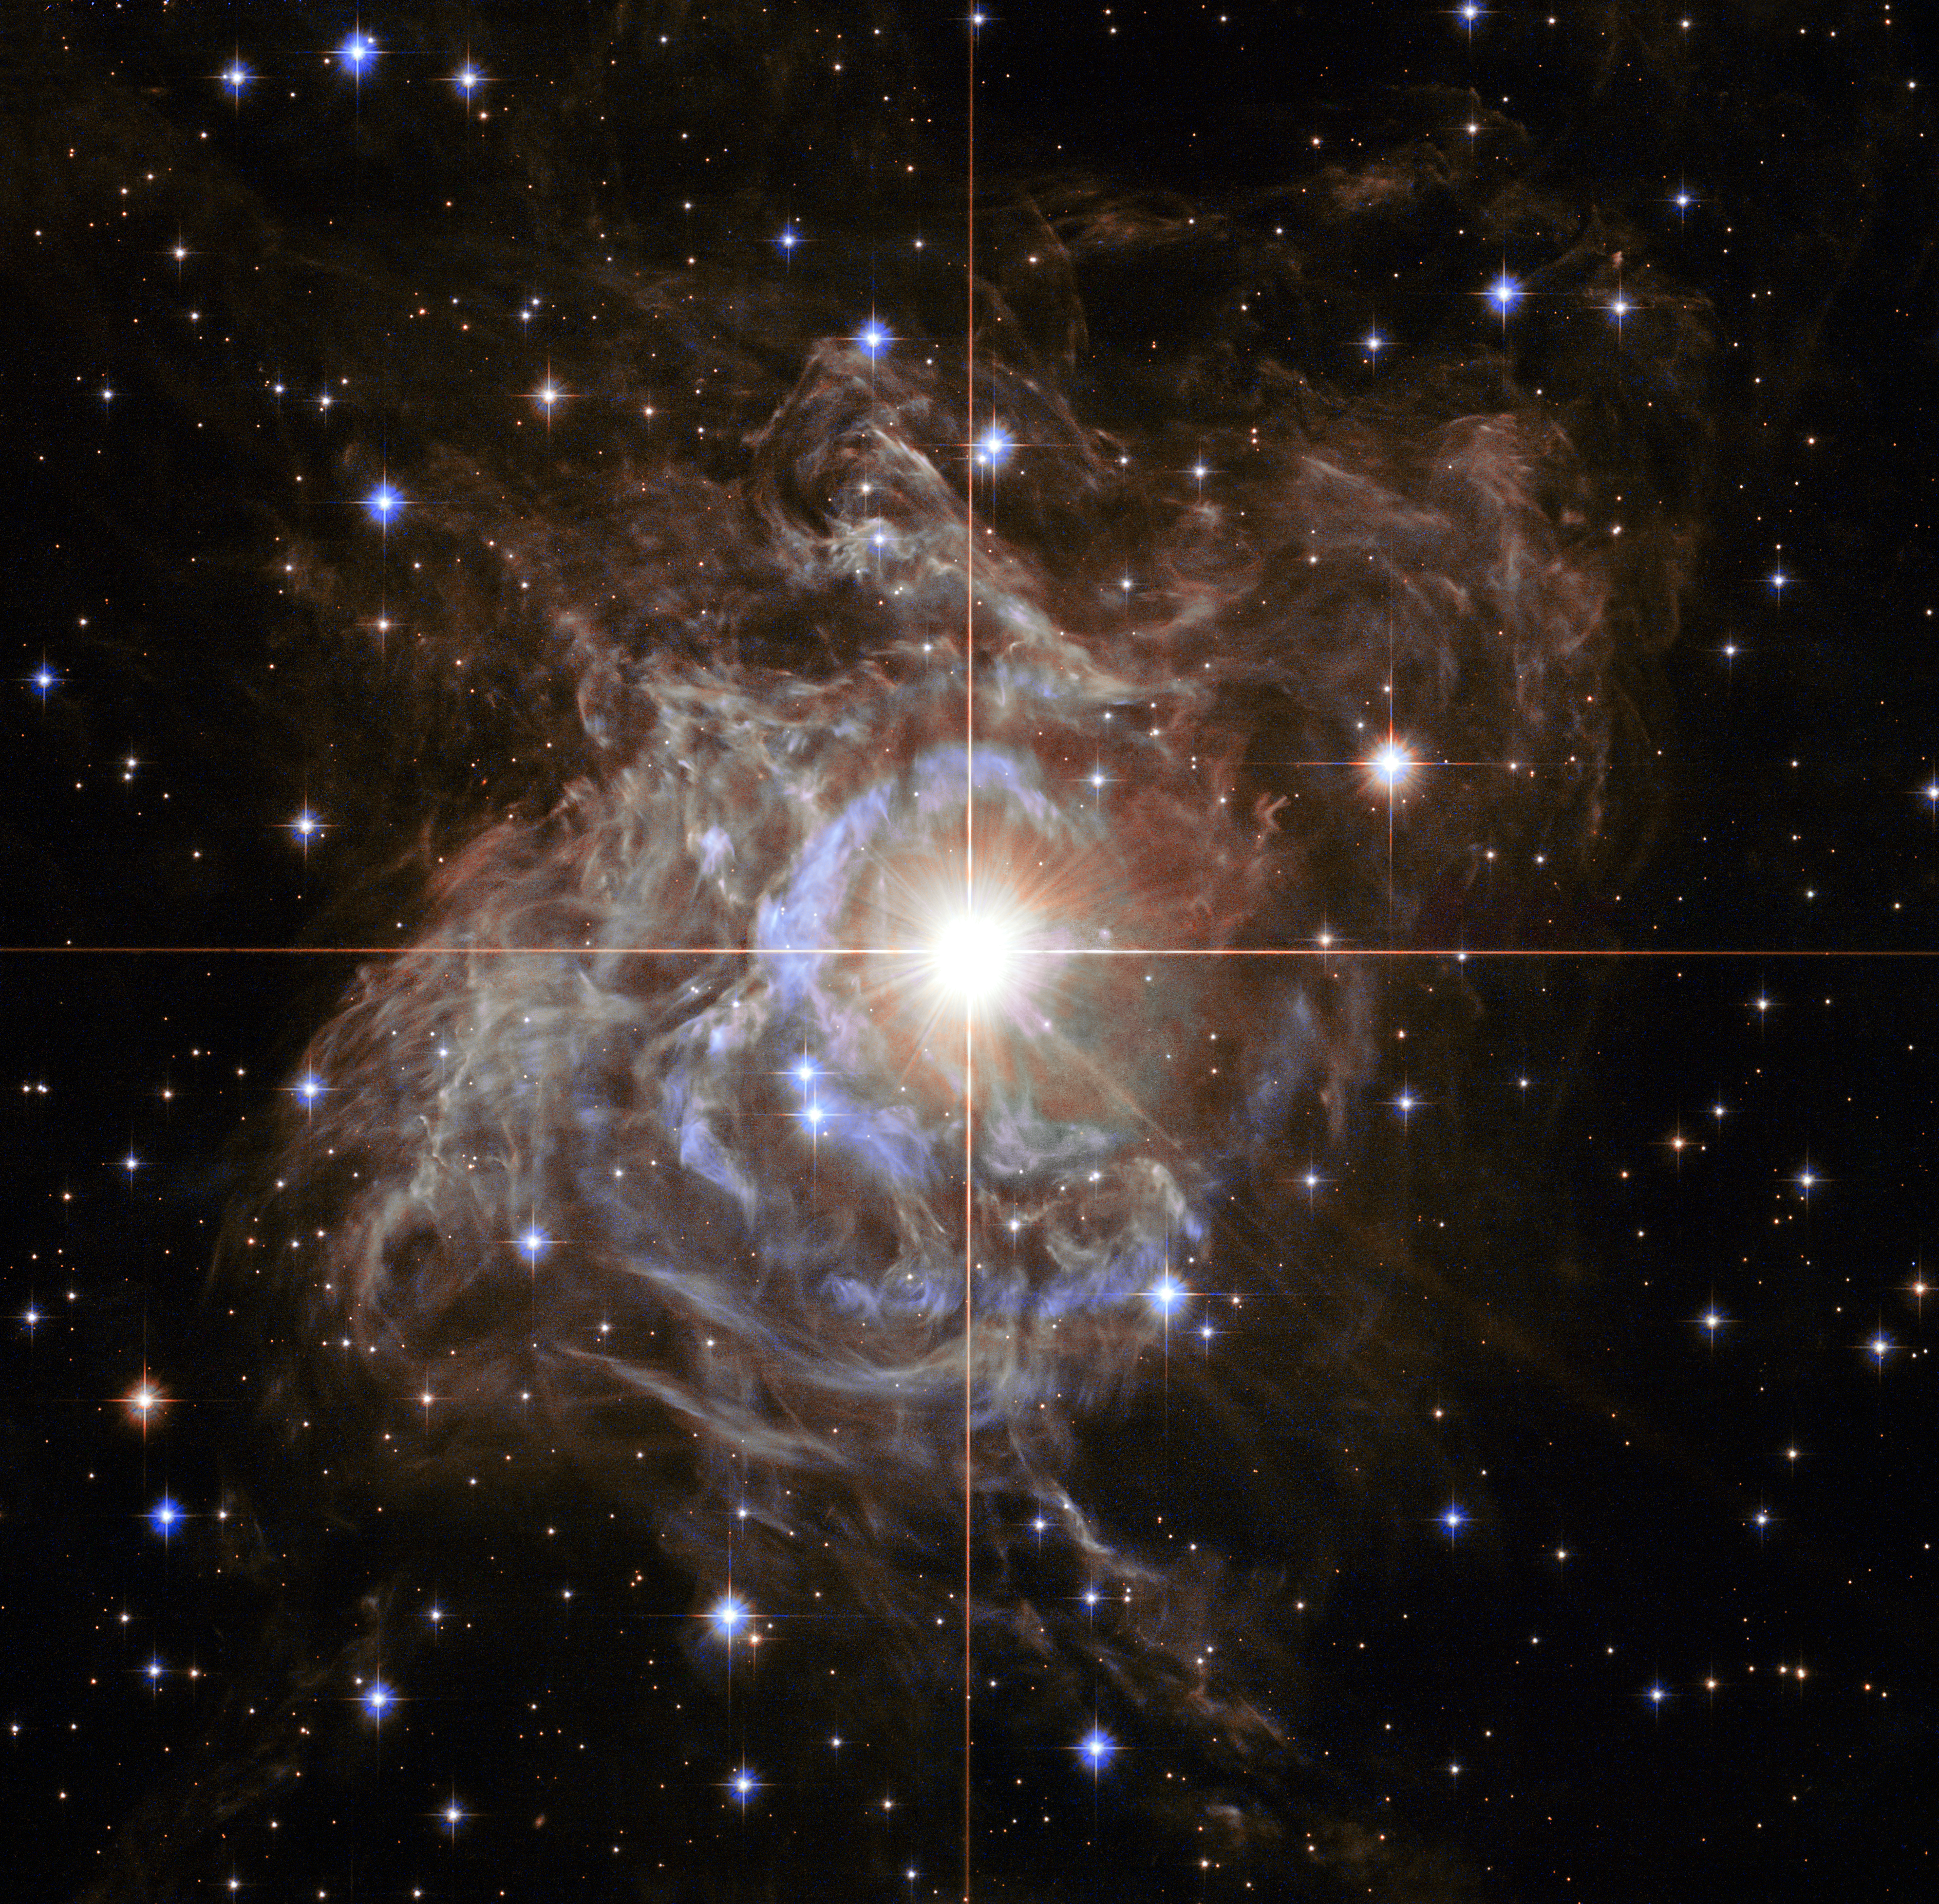

Hubble image of variable star RS Puppis

This Hubble image shows RS Puppis, a type of variable star known as a Cepheid variable. As variable stars go, Cepheids have comparatively long periods — RS Puppis, for example, varies in brightness by almost a factor of five every 40 or so days.

RS Puppis is unusual; this variable star is shrouded by thick, dark clouds of dust enabling a phenomenon known as a light echo to be shown with stunning clarity.

These Hubble observations show the ethereal object embedded in its dusty environment, set against a dark sky filled with background galaxies.

Credit: NASA, ESA, and the Hubble Heritage Team (STScI/AURA)-Hubble/Europe Collaboration Acknowledgment: H. Bond (STScI and Penn State University)